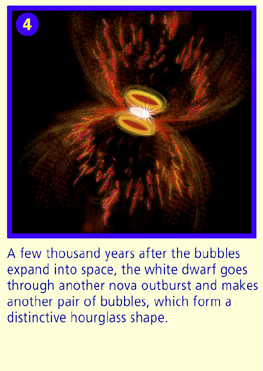

Panel 4

A few thousand years after the bubbles expand into space, the white dwarf goes through another nova outburst and makes another pair of bubbles, which form a distinctive hourglass shape.

Credit: NASA & ESA